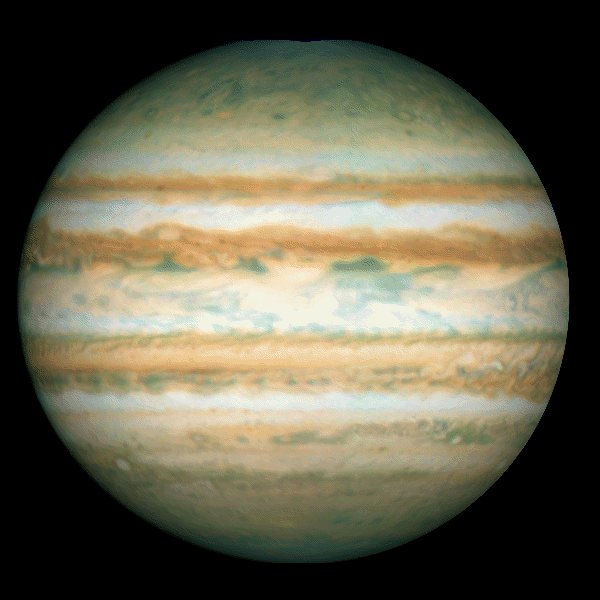

Galileo Probe Entry Site on Jupiter

This Hubble Space Telescope image of Jupiter was taken on Oct. 5, 1995, when the giant planet was at a distance of 534 million miles (854 million kilometers) from Earth.

The arrow points to the predicted site at which the Galileo Probe will enter Jupiter's atmosphere on December 7, 1995. At this latitude, the eastward winds have speeds of about 250 miles per hour (110 meters per second).

Credit: Reta Beebe (New Mexico State University), and NASA/ESA